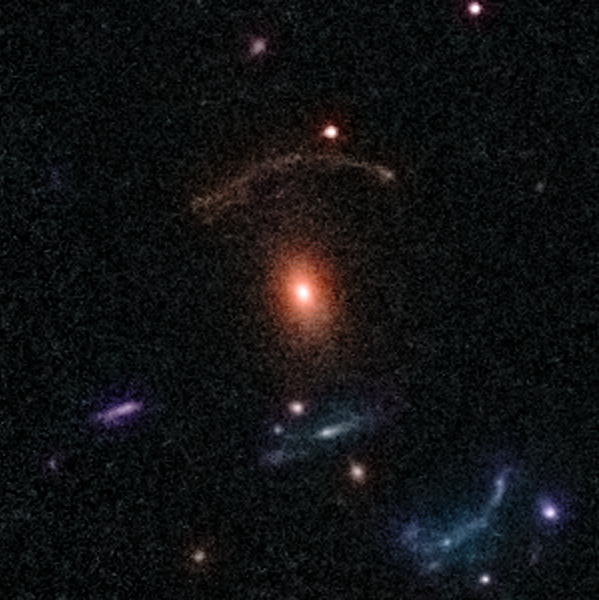

Gravitational Lens 0211+1139

This lens is an example of the rich diversity of 67 strong gravitational lenses found in the COSMOS survey. The lenses were discovered in a recently completed, large set of observations as part of a project to survey a single 1.6-square-degree field of sky (nine times the area of the full Moon) with several space-based and Earth-based observatories.

Gravitational lenses occur when light travelling towards us from a distant galaxy is magnified and distorted as it encounters a massive object between the galaxy and us. These gravitational lenses often allow astronomers to peer much further back into the early Universe than they would normally be able to.

This is a colour image composed by data taken by CFHT, and sharpened with images taken by Hubble ACS camera.

Credit: NASA, ESA, C. Faure (Zentrum für Astronomie, University of Heidelberg) and J.P. Kneib (Laboratoire d'Astrophysique de Marseille)